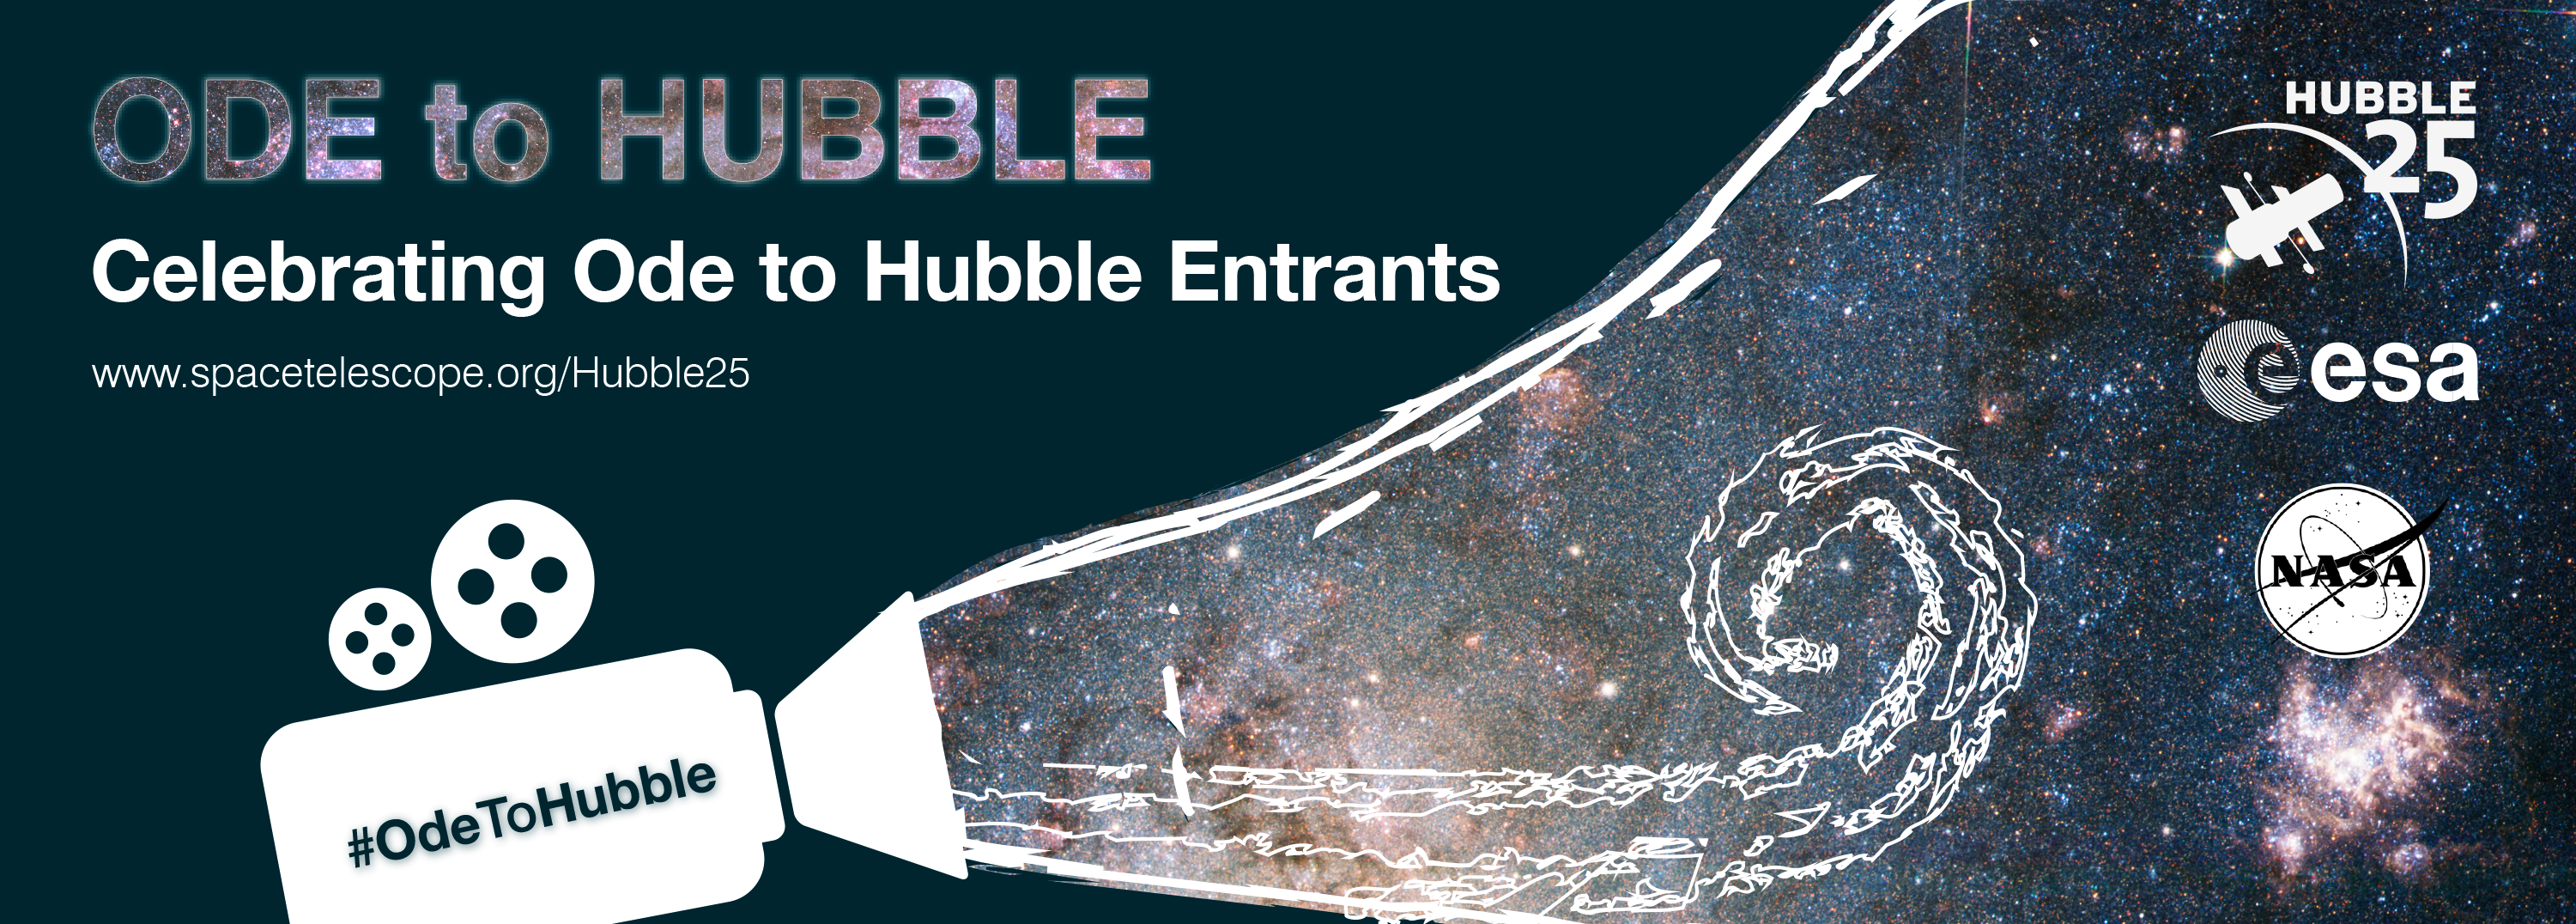

Ode to Hubble shortlist announced

A promotional banner for the Ode to Hubble competition. A video competition to celebrate Hubble's 25th year in orbit.

Credit: NASA & ESA